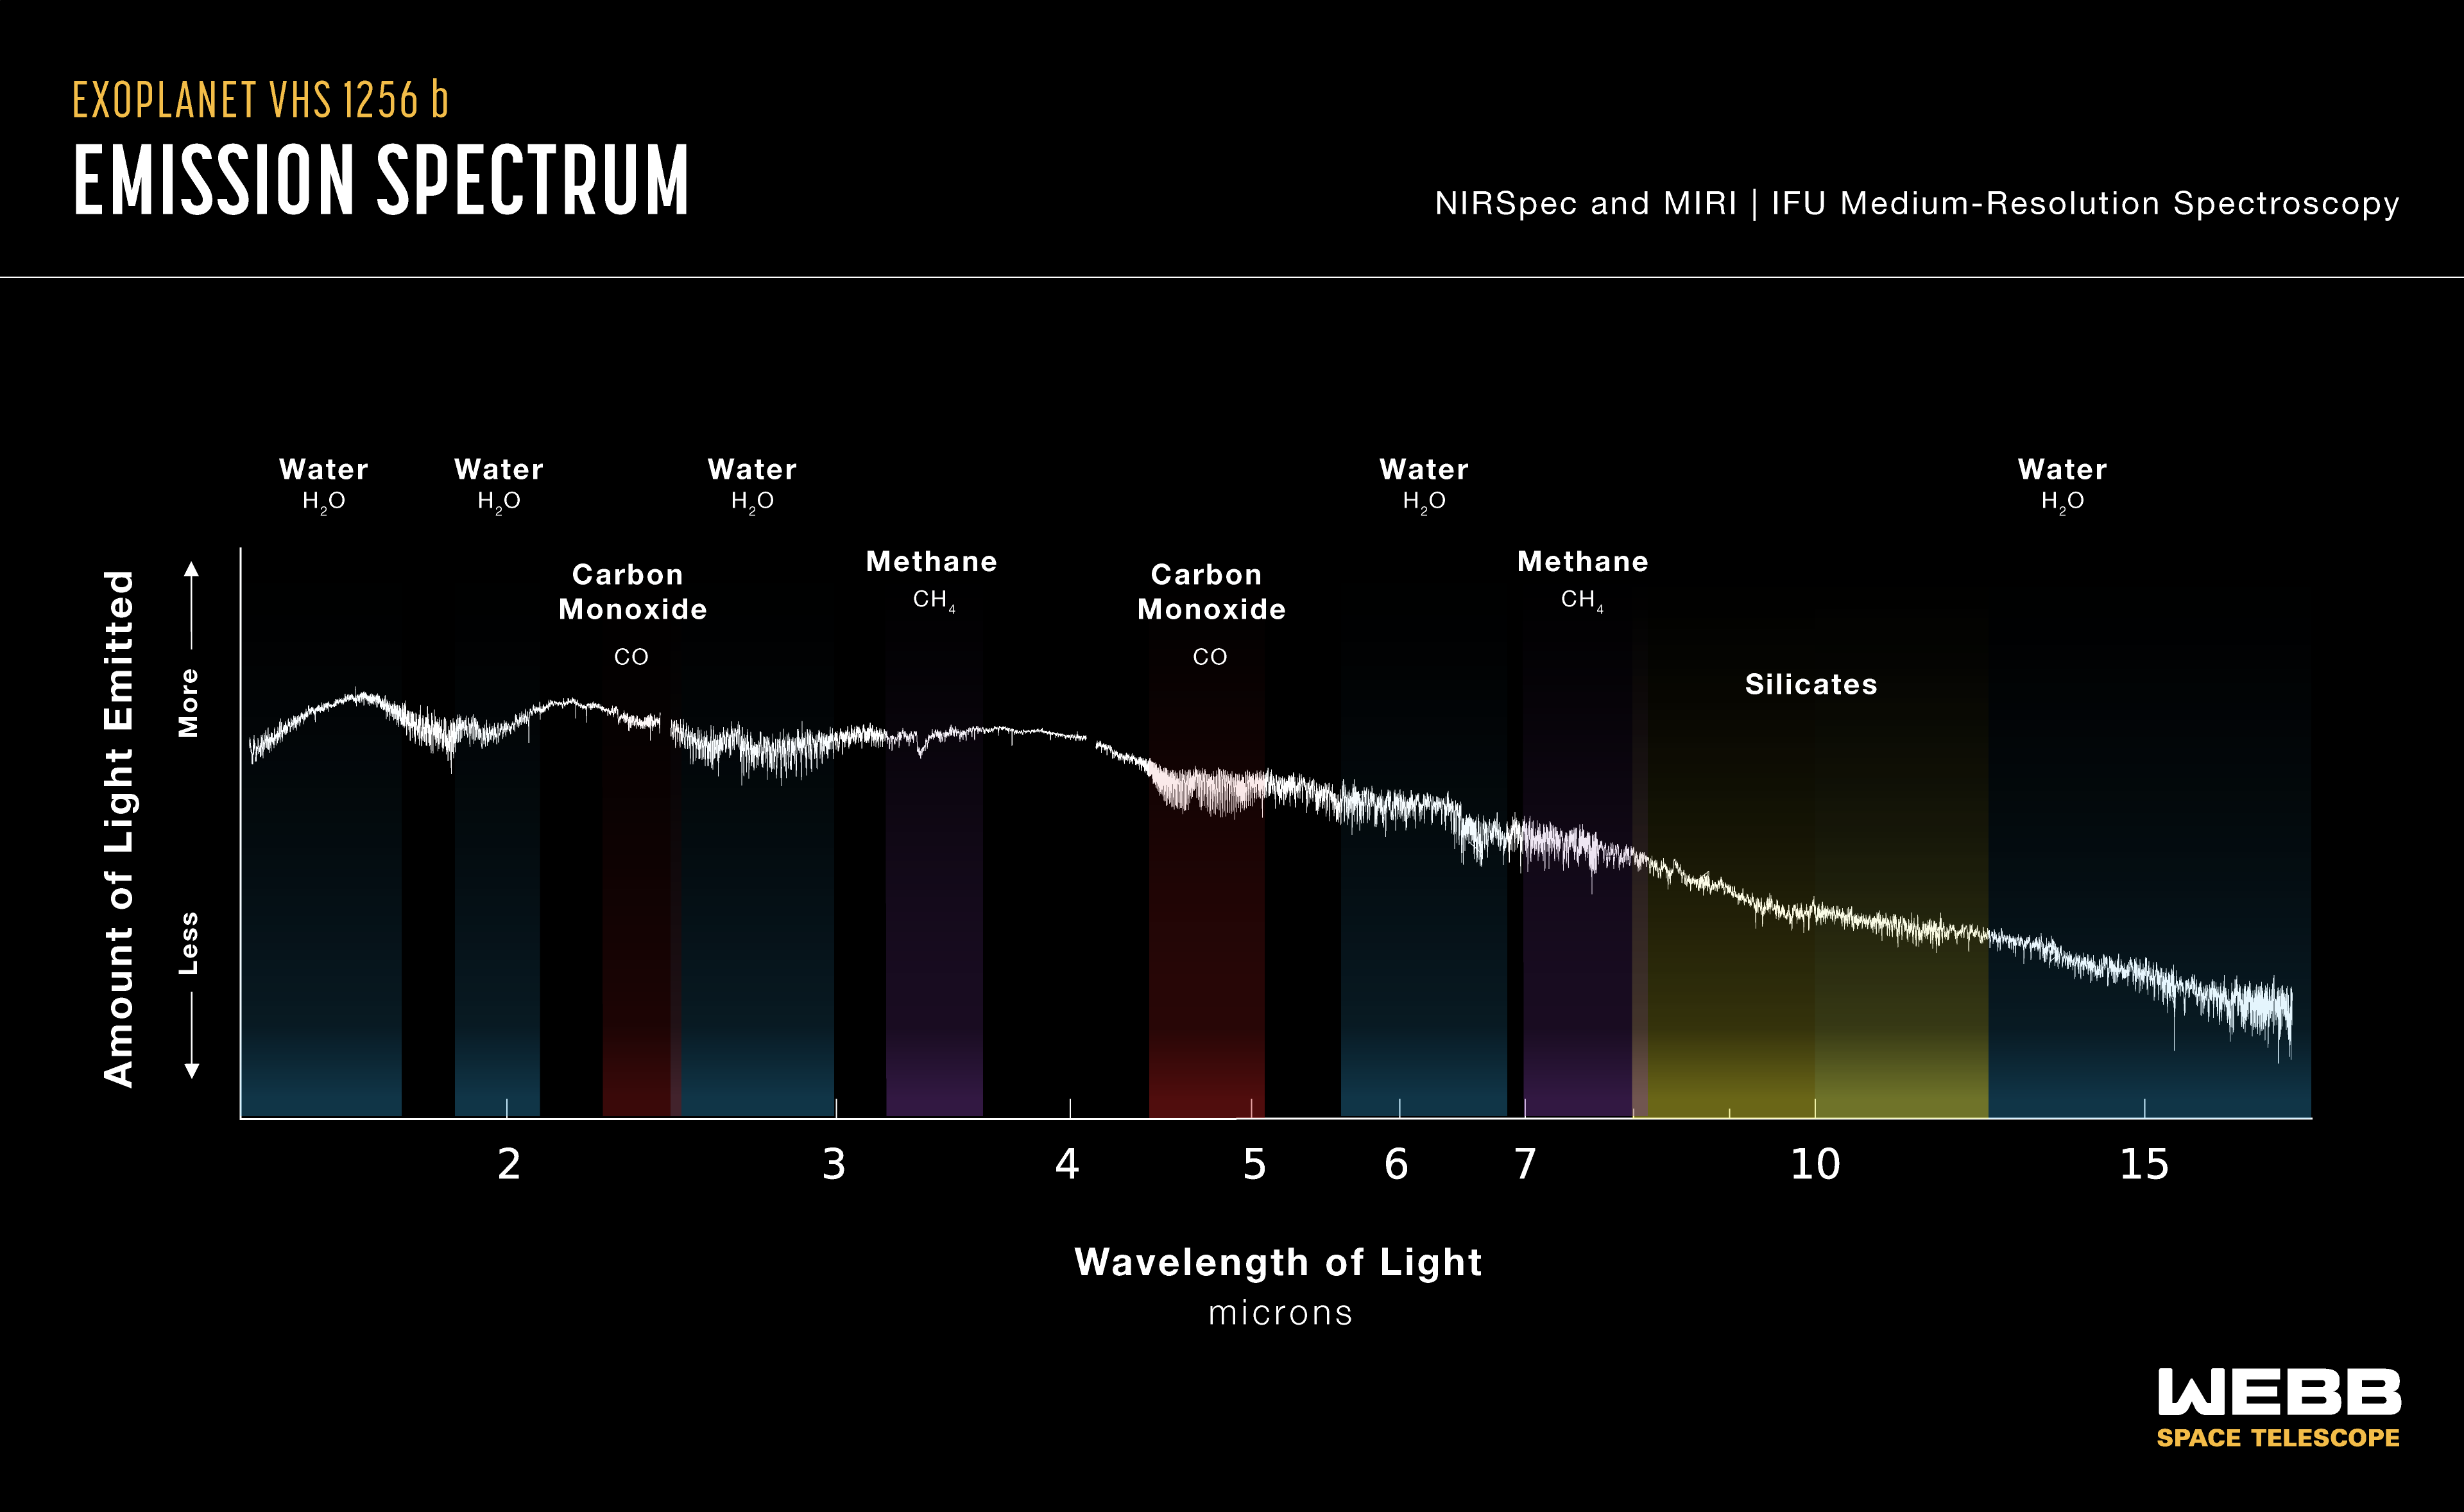

Exoplanet VHS 1256 b (NIRSpec and MIRI emission spectrum)

A research team led by Brittany Miles of the University of Arizona used two instruments known as spectrographs aboard the James Webb Space Telescope, one on its Near Infrared Spectrograph (NIRSpec) and another on its Mid-Infrared Instrument (MIRI), to observe a vast section of near- to mid-infrared light emitted by the planet VHS 1256 b. They plotted the light on the spectrum, identifying signatures of silicate clouds, water, methane and carbon monoxide. They also found evidence of carbon dioxide.

Credit: NASA, ESA, CSA, J. Olmsted (STScI), B. Miles (University of Arizona), S. Hinkley (University of Exeter), B. Biller (University of Edinburgh), A. Skemer (University of California, Santa Cruz)